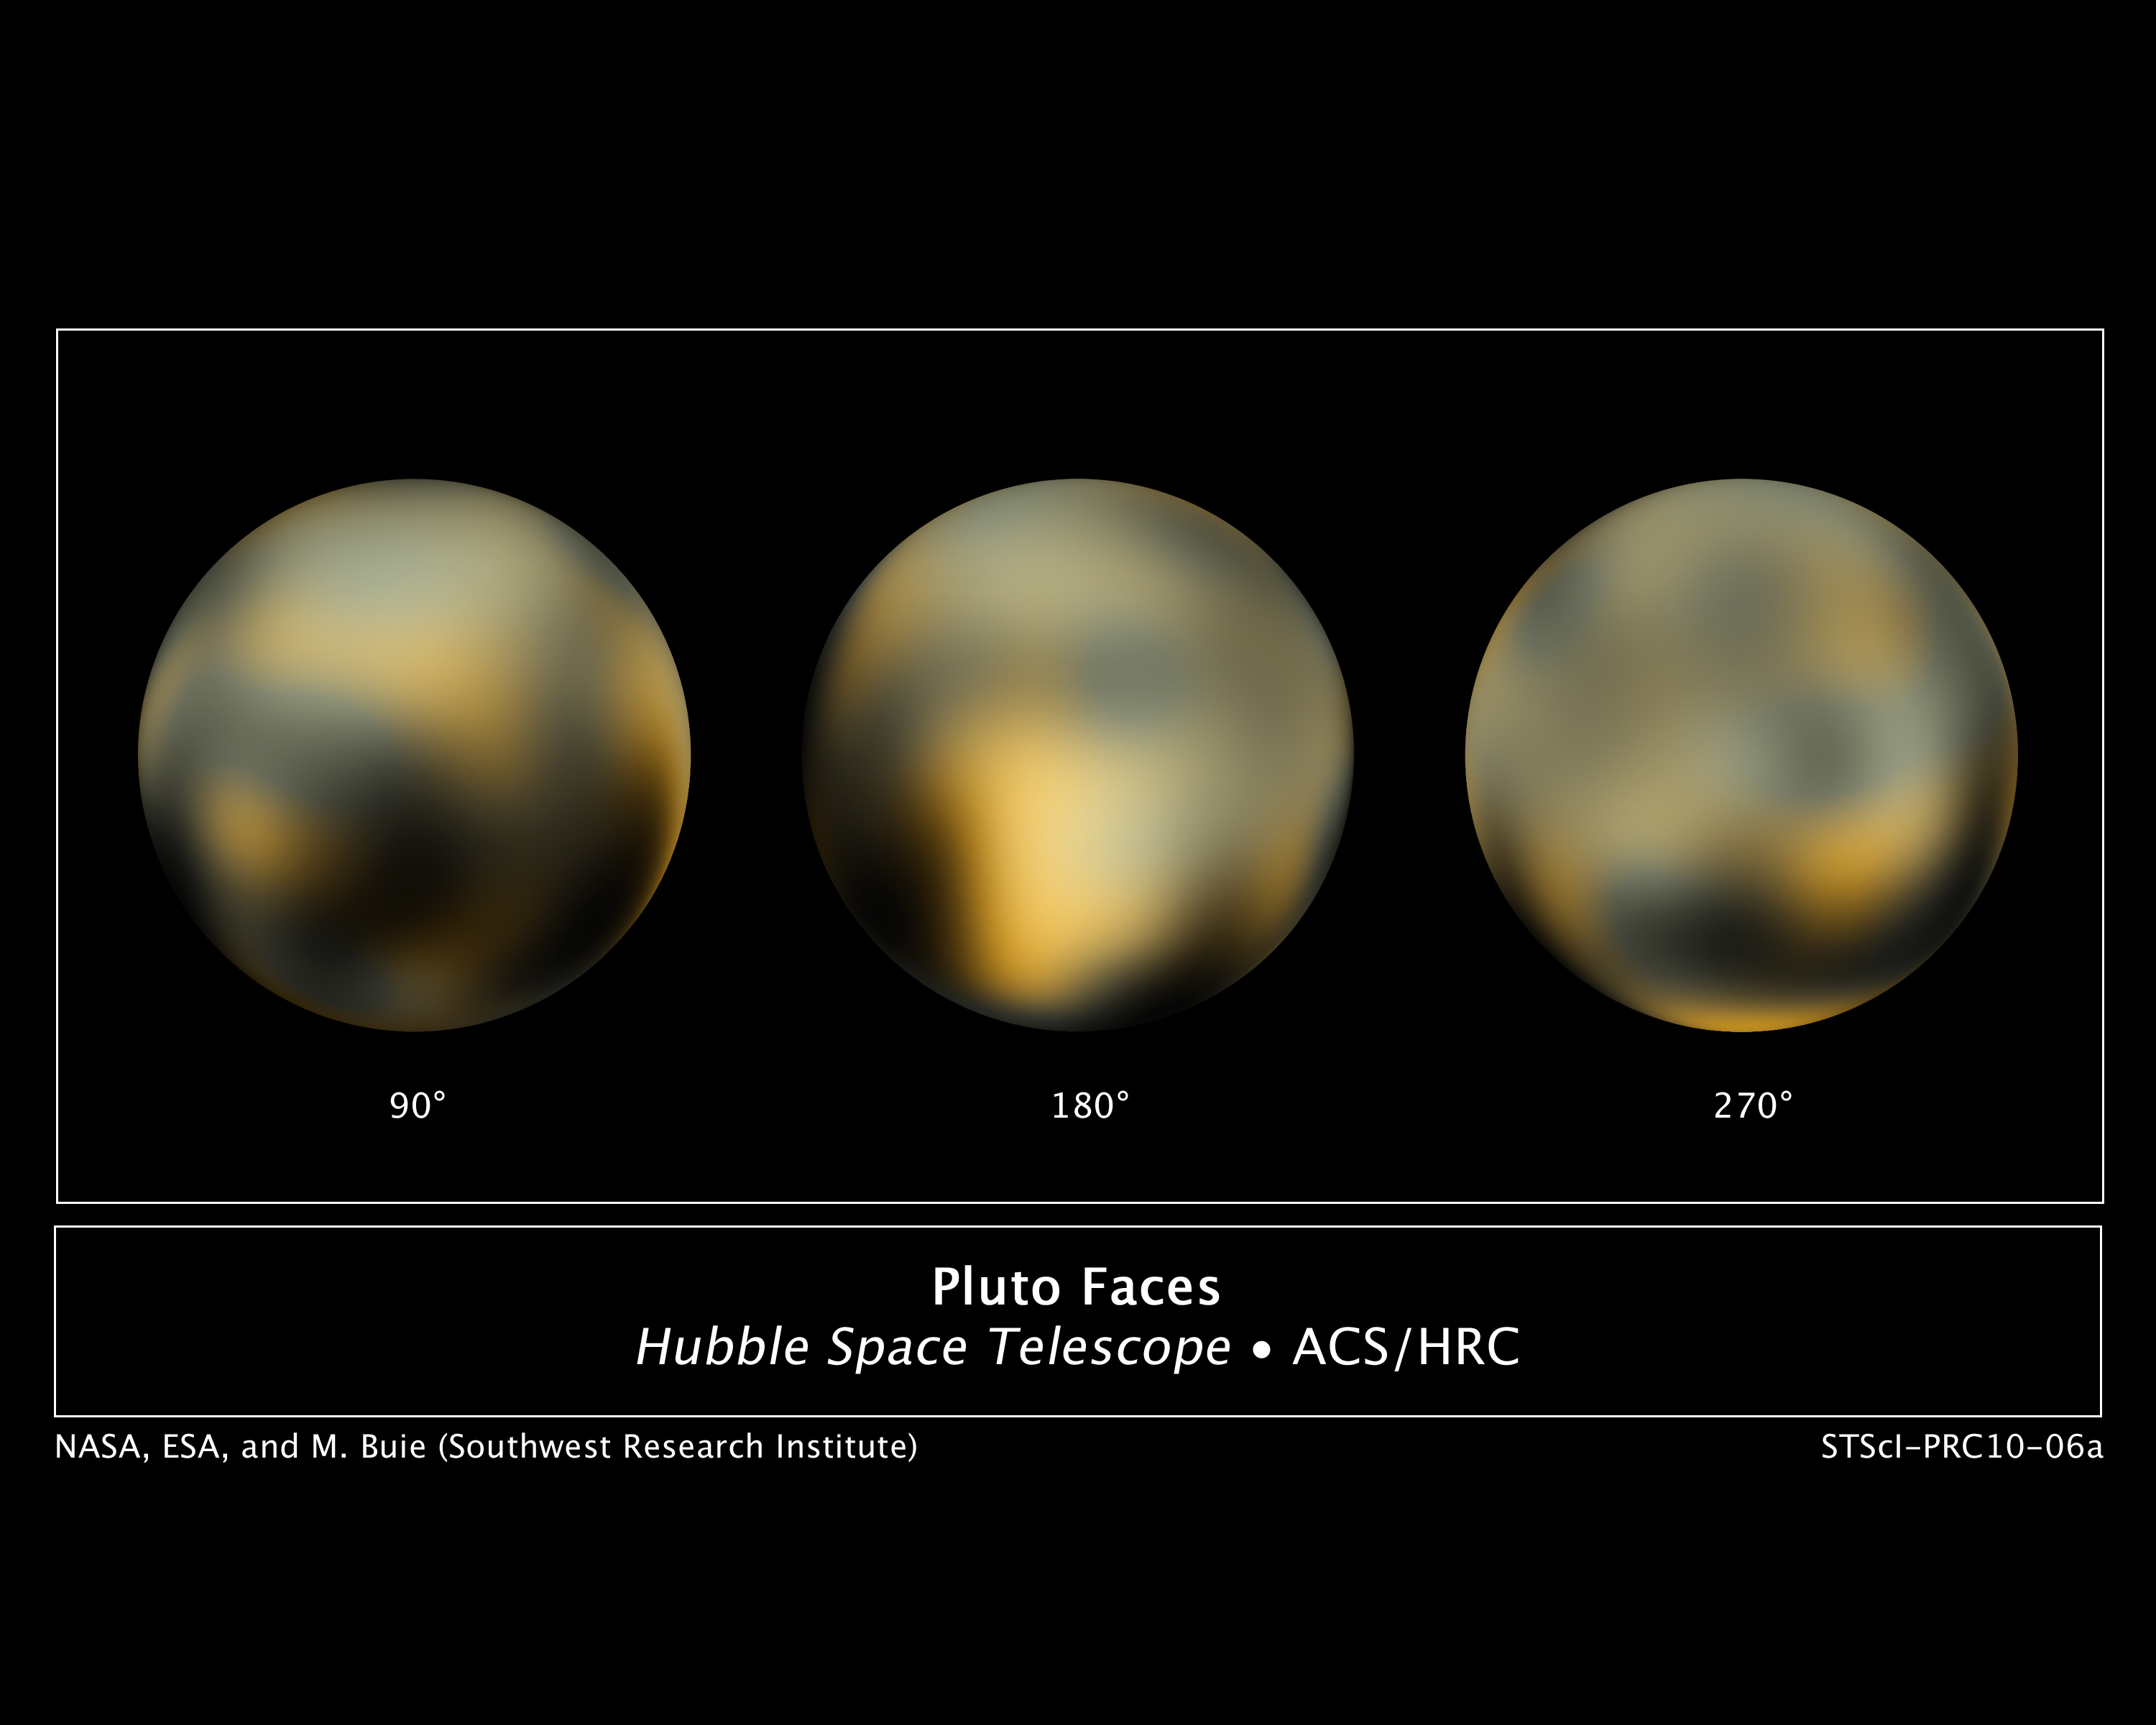

The changing faces of Pluto

This is the most detailed view to date of the entire surface of the dwarf planet Pluto, as constructed from multiple NASA/ESA Hubble Space Telescope photographs taken from 2002 to 2003.

Hubble's view isn't sharp enough to see craters or mountains, if they exist on the surface, but Hubble reveals a complex-looking and variegated world with white, dark-orange, and charcoal-black terrain. The overall colour is believed to be a result of ultraviolet radiation from the distant Sun breaking up methane that is present on Pluto's surface, leaving behind a dark, molasses-coloured, carbon-rich residue.

The centre disk (180 degrees) has a mysterious bright spot that is unusually rich in carbon monoxide frost. This region will be photographed in the highest possible detail when NASA's New Horizons probe flies by Pluto in 2015.

The Hubble images are a few pixels wide. But through a technique called dithering, multiple, slightly offset pictures can be combined through computer-image processing to synthesize a higher-resolution view than could be seen in a single exposure. This series of pictures took four years and 20 computers operating continuously and simultaneously to accomplish.

Credit: NASA, ESA and M. Buie (Southwest Research Institute)